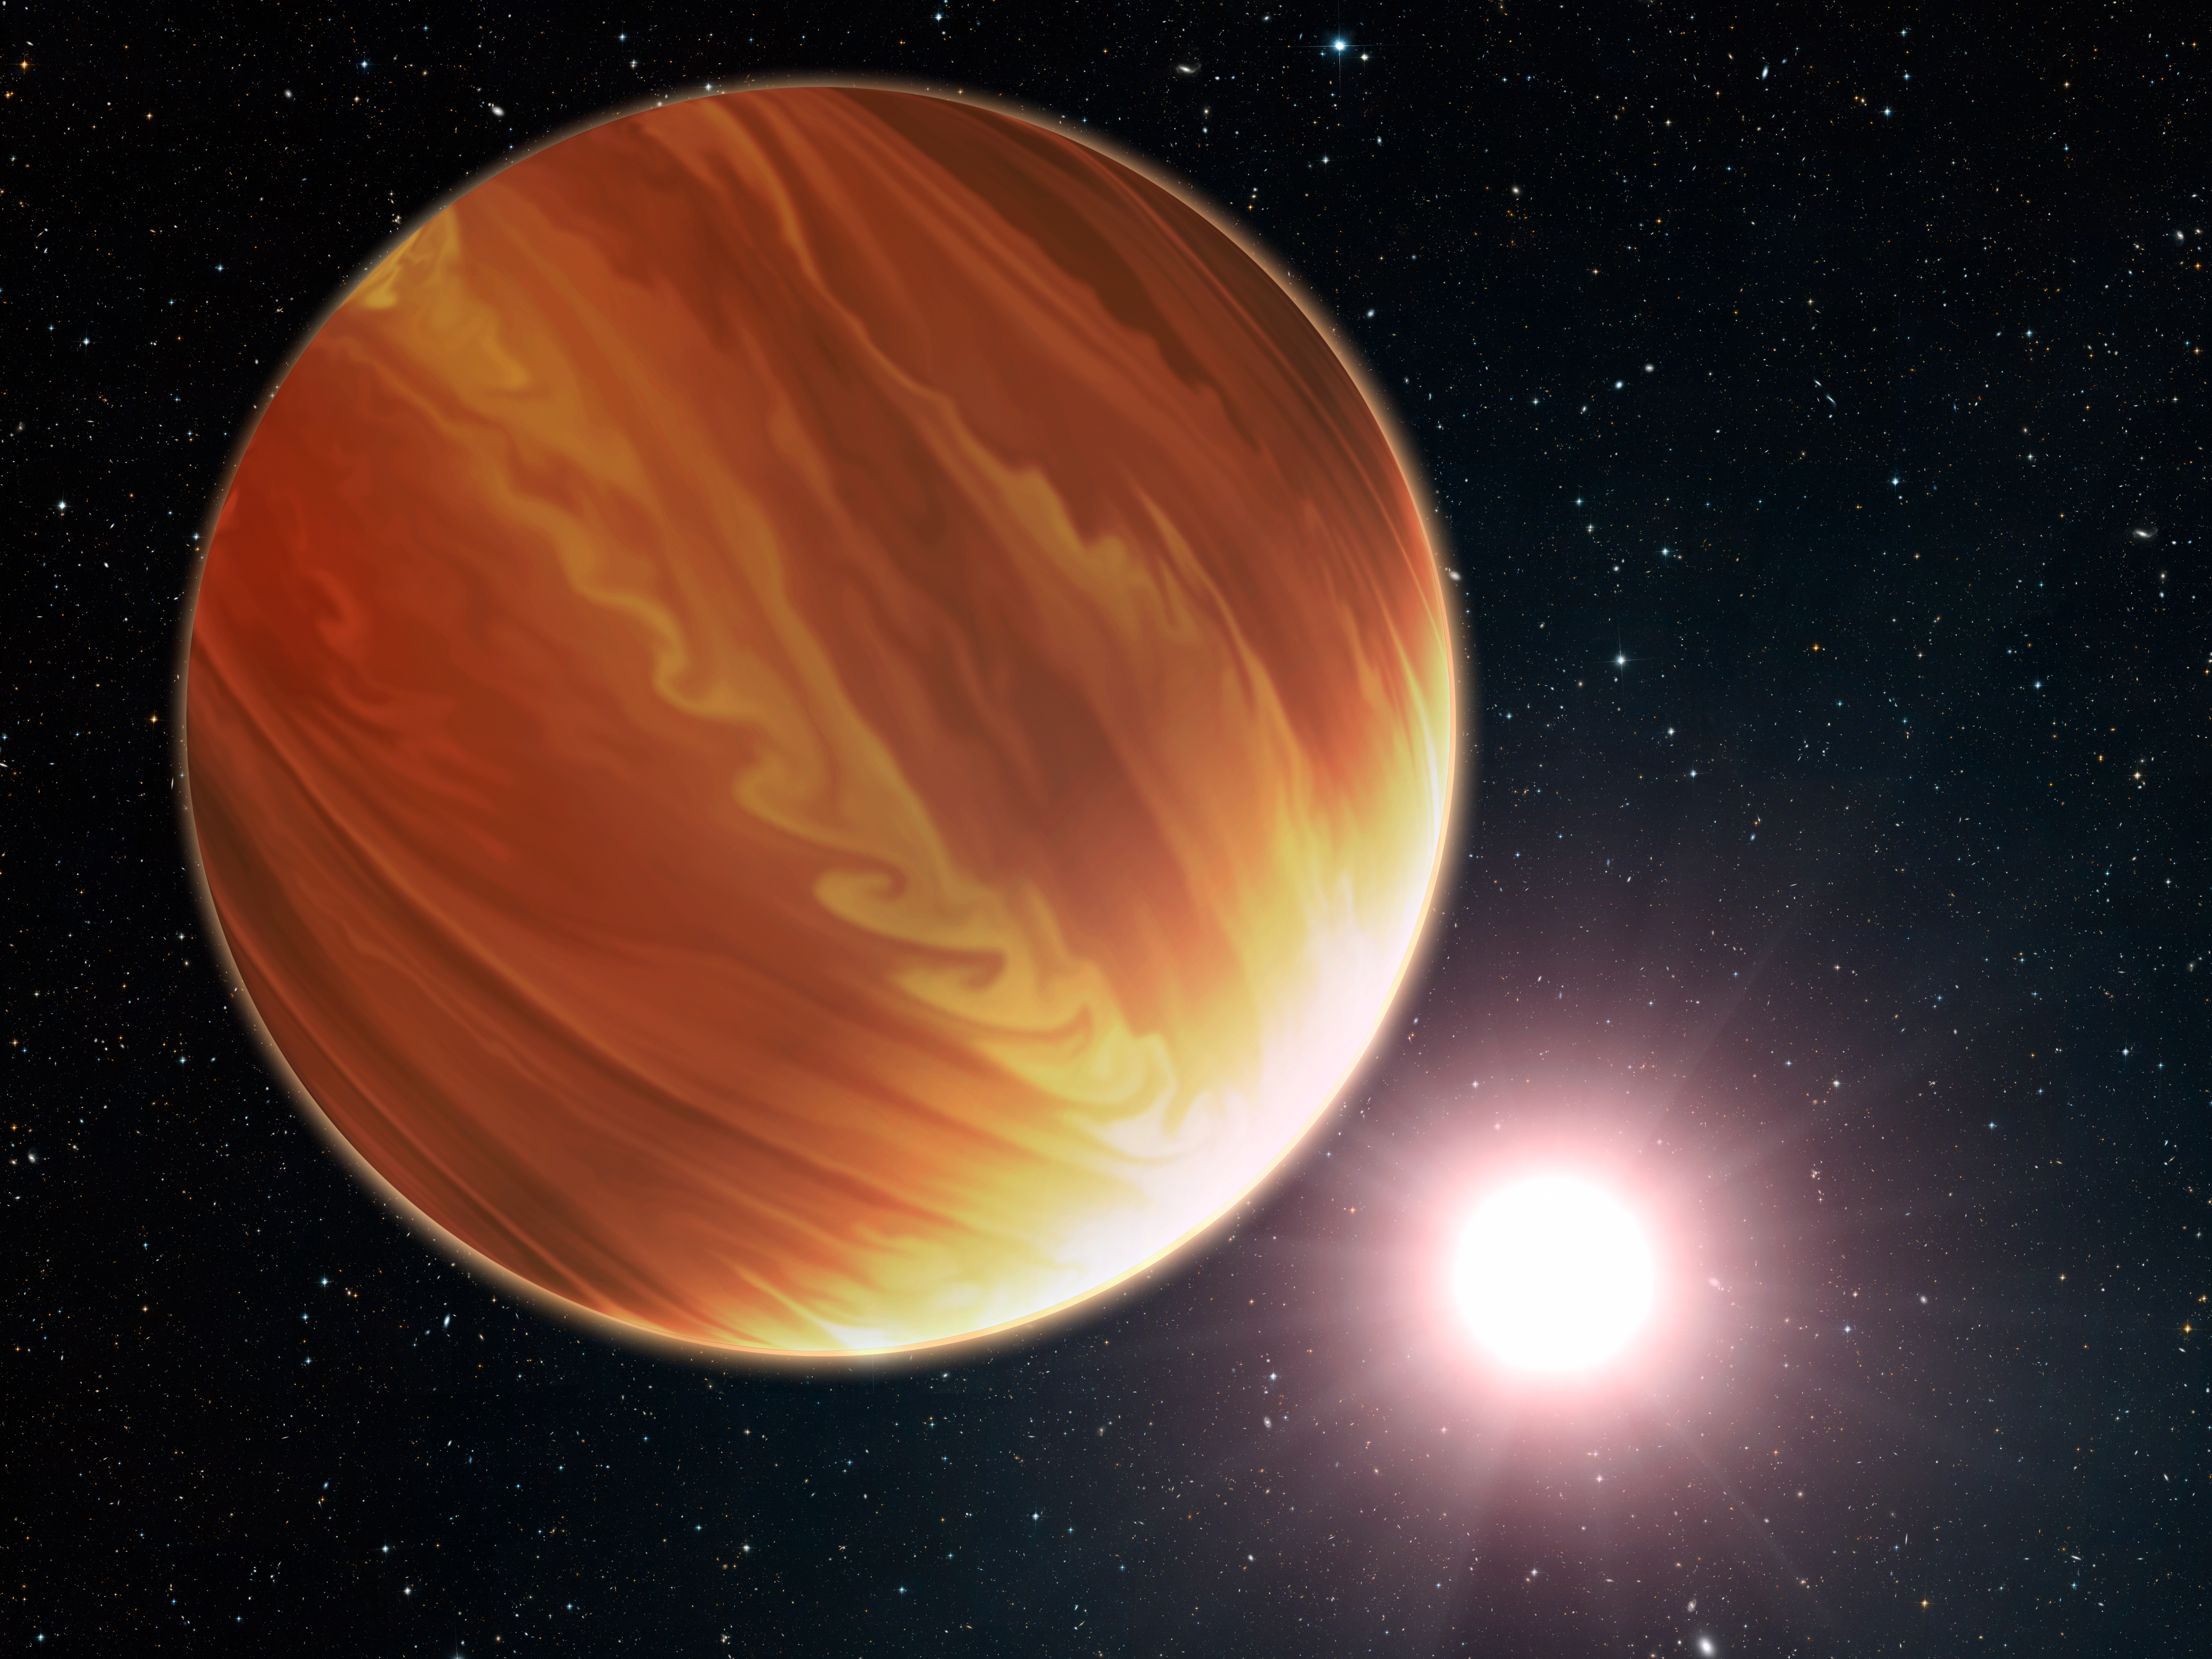

Artist's impression of the hot planet Osiris

This is an artistic illustration of the gas giant planet HD 209458b (unofficially named Osiris) located 150 light-years away in the constellation Pegasus.

This is a "hot Jupiter" class planet. Estimated to be 220 times the mass of Earth. The planet's atmosphere is almost 1000 degrees celsius. It orbits very closely to its bright sun-like star, and the orbit is tilted edge-on to Earth. This makes the planet an ideal candidate for the NASA/ESA Hubble Space Telescope to analyse and make precise measurements of the chemical composition of the giant's atmosphere as starlight filters though it. To the surprise of astronomers, they have found much less water vapor in the atmosphere than standard planet-formation models predict.

Credit: NASA, ESA, and G. Bacon (STScI)